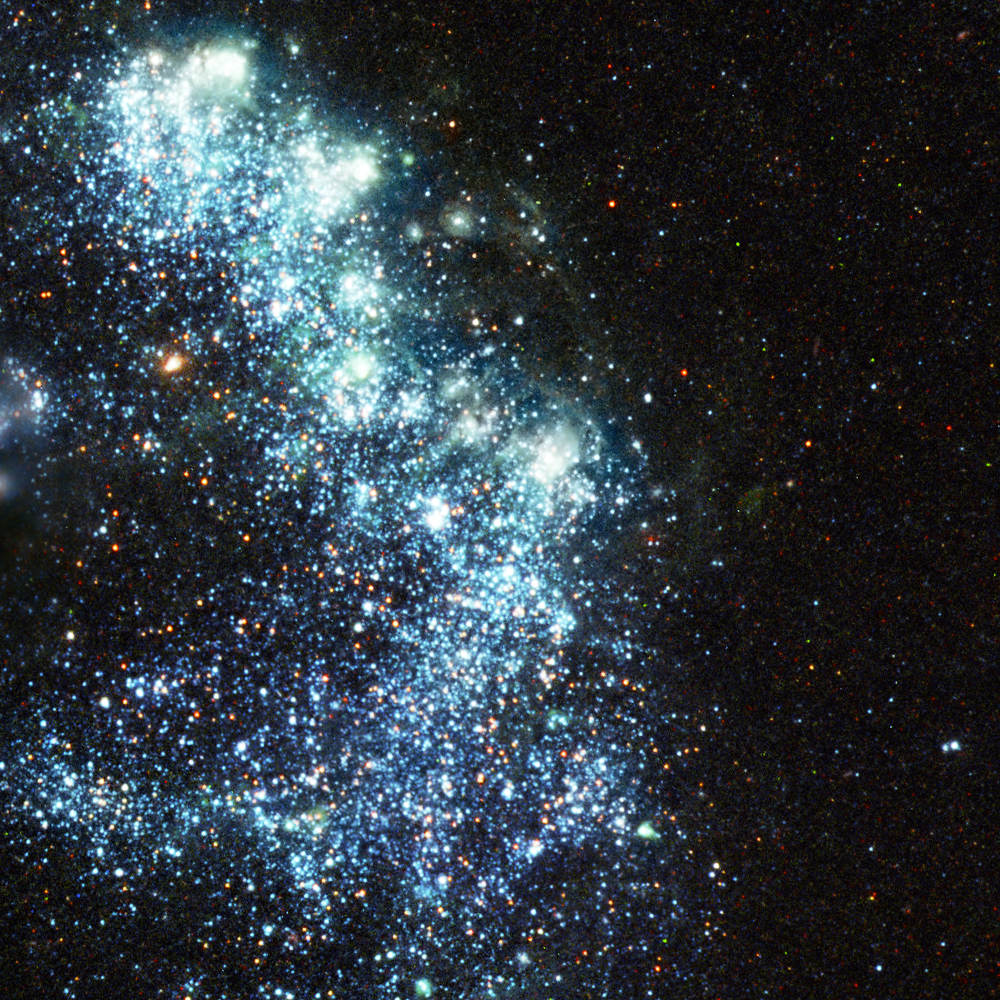

Pinwheel Galaxy close-up 4

An example of some of the 3000 bright clusters of sizzling newborn blue stars in the Pinwheel galaxy.

Credit: Image: European Space Agency & NASA
Acknowledgements:
Project Investigators for the original Hubble data: K.D. Kuntz (GSFC), F. Bresolin (University of Hawaii), J. Trauger (JPL), J. Mould (NOAO), and Y.-H. Chu (University of Illinois, Urbana)
Image processing: Davide De Martin (ESA/Hubble)
CFHT image: Canada-France-Hawaii Telescope/J.-C. Cuillandre/Coelum
NOAO image: George Jacoby, Bruce Bohannan, Mark Hanna/NOAO/AURA/NSF